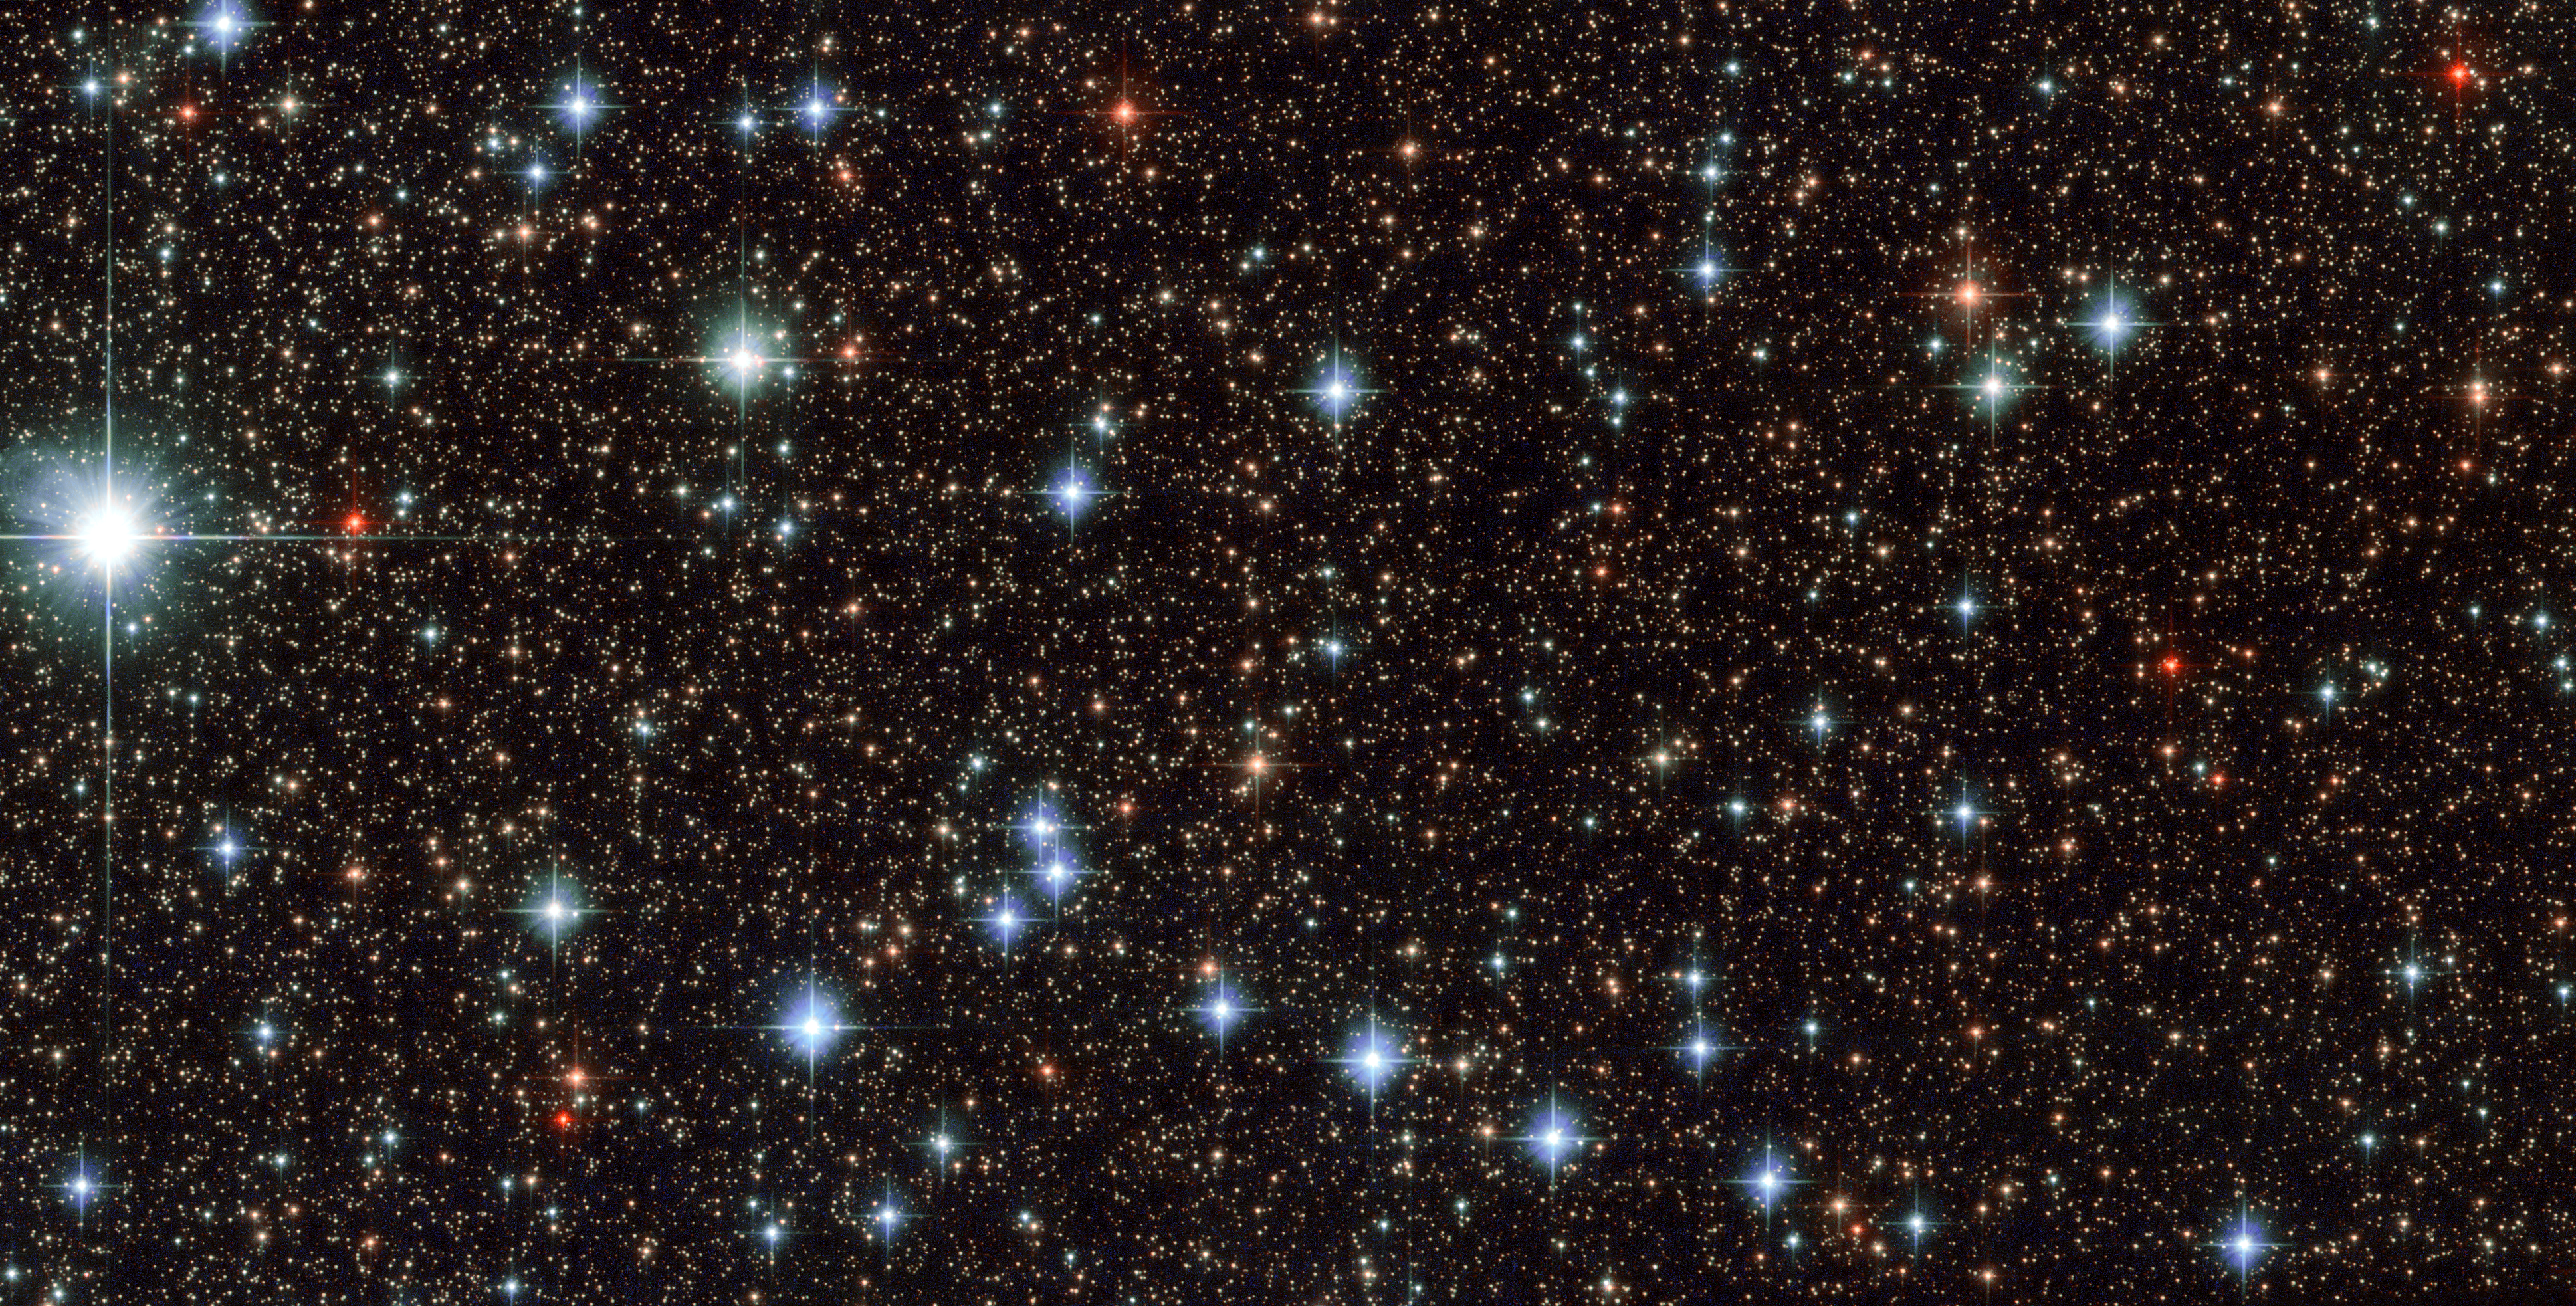

A slice of Sagittarius

This stunning image, captured by the NASA/ESA Hubble Space Telescope’s Advanced Camera for Surveys (ACS), shows part of the sky in the constellation of Sagittarius (The Archer). The region is rendered in exquisite detail — deep red and bright blue stars are scattered across the frame, set against a background of thousands of more distant stars and galaxies. Two features are particularly striking: the colours of the stars, and the dramatic crosses that burst from the centres of the brightest bodies.

While some of the colours in this frame have been enhanced and tweaked during the process of creating the image from the observational data, different stars do indeed glow in different colours. Stars differ in colour according to their surface temperature: very hot stars are blue or white, while cooler stars are redder. They may be cooler because they are smaller, or because they are very old and have entered the red giant phase, when an old star expands and cools dramatically as its core collapses.

The crosses are nothing to do with the stars themselves, and, because Hubble orbits above Earth’s atmosphere, nor are they due to any kind of atmospheric disturbance. They are actually known as diffraction spikes, and are caused by the structure of the telescope itself. Like all big modern telescopes, Hubble uses mirrors to capture light and form images. Its secondary mirror is supported by struts, called telescope spiders, arranged in a cross formation, and they diffract the incoming light. Diffraction is the slight bending of light as it passes near the edge of an object. Every cross in this image is due to a single set of struts within Hubble itself! Whilst the spikes are technically an inaccuracy, many astrophotographers choose to emphasise and celebrate them as a beautiful feature of their images.

Credit: ESA/Hubble & NASA